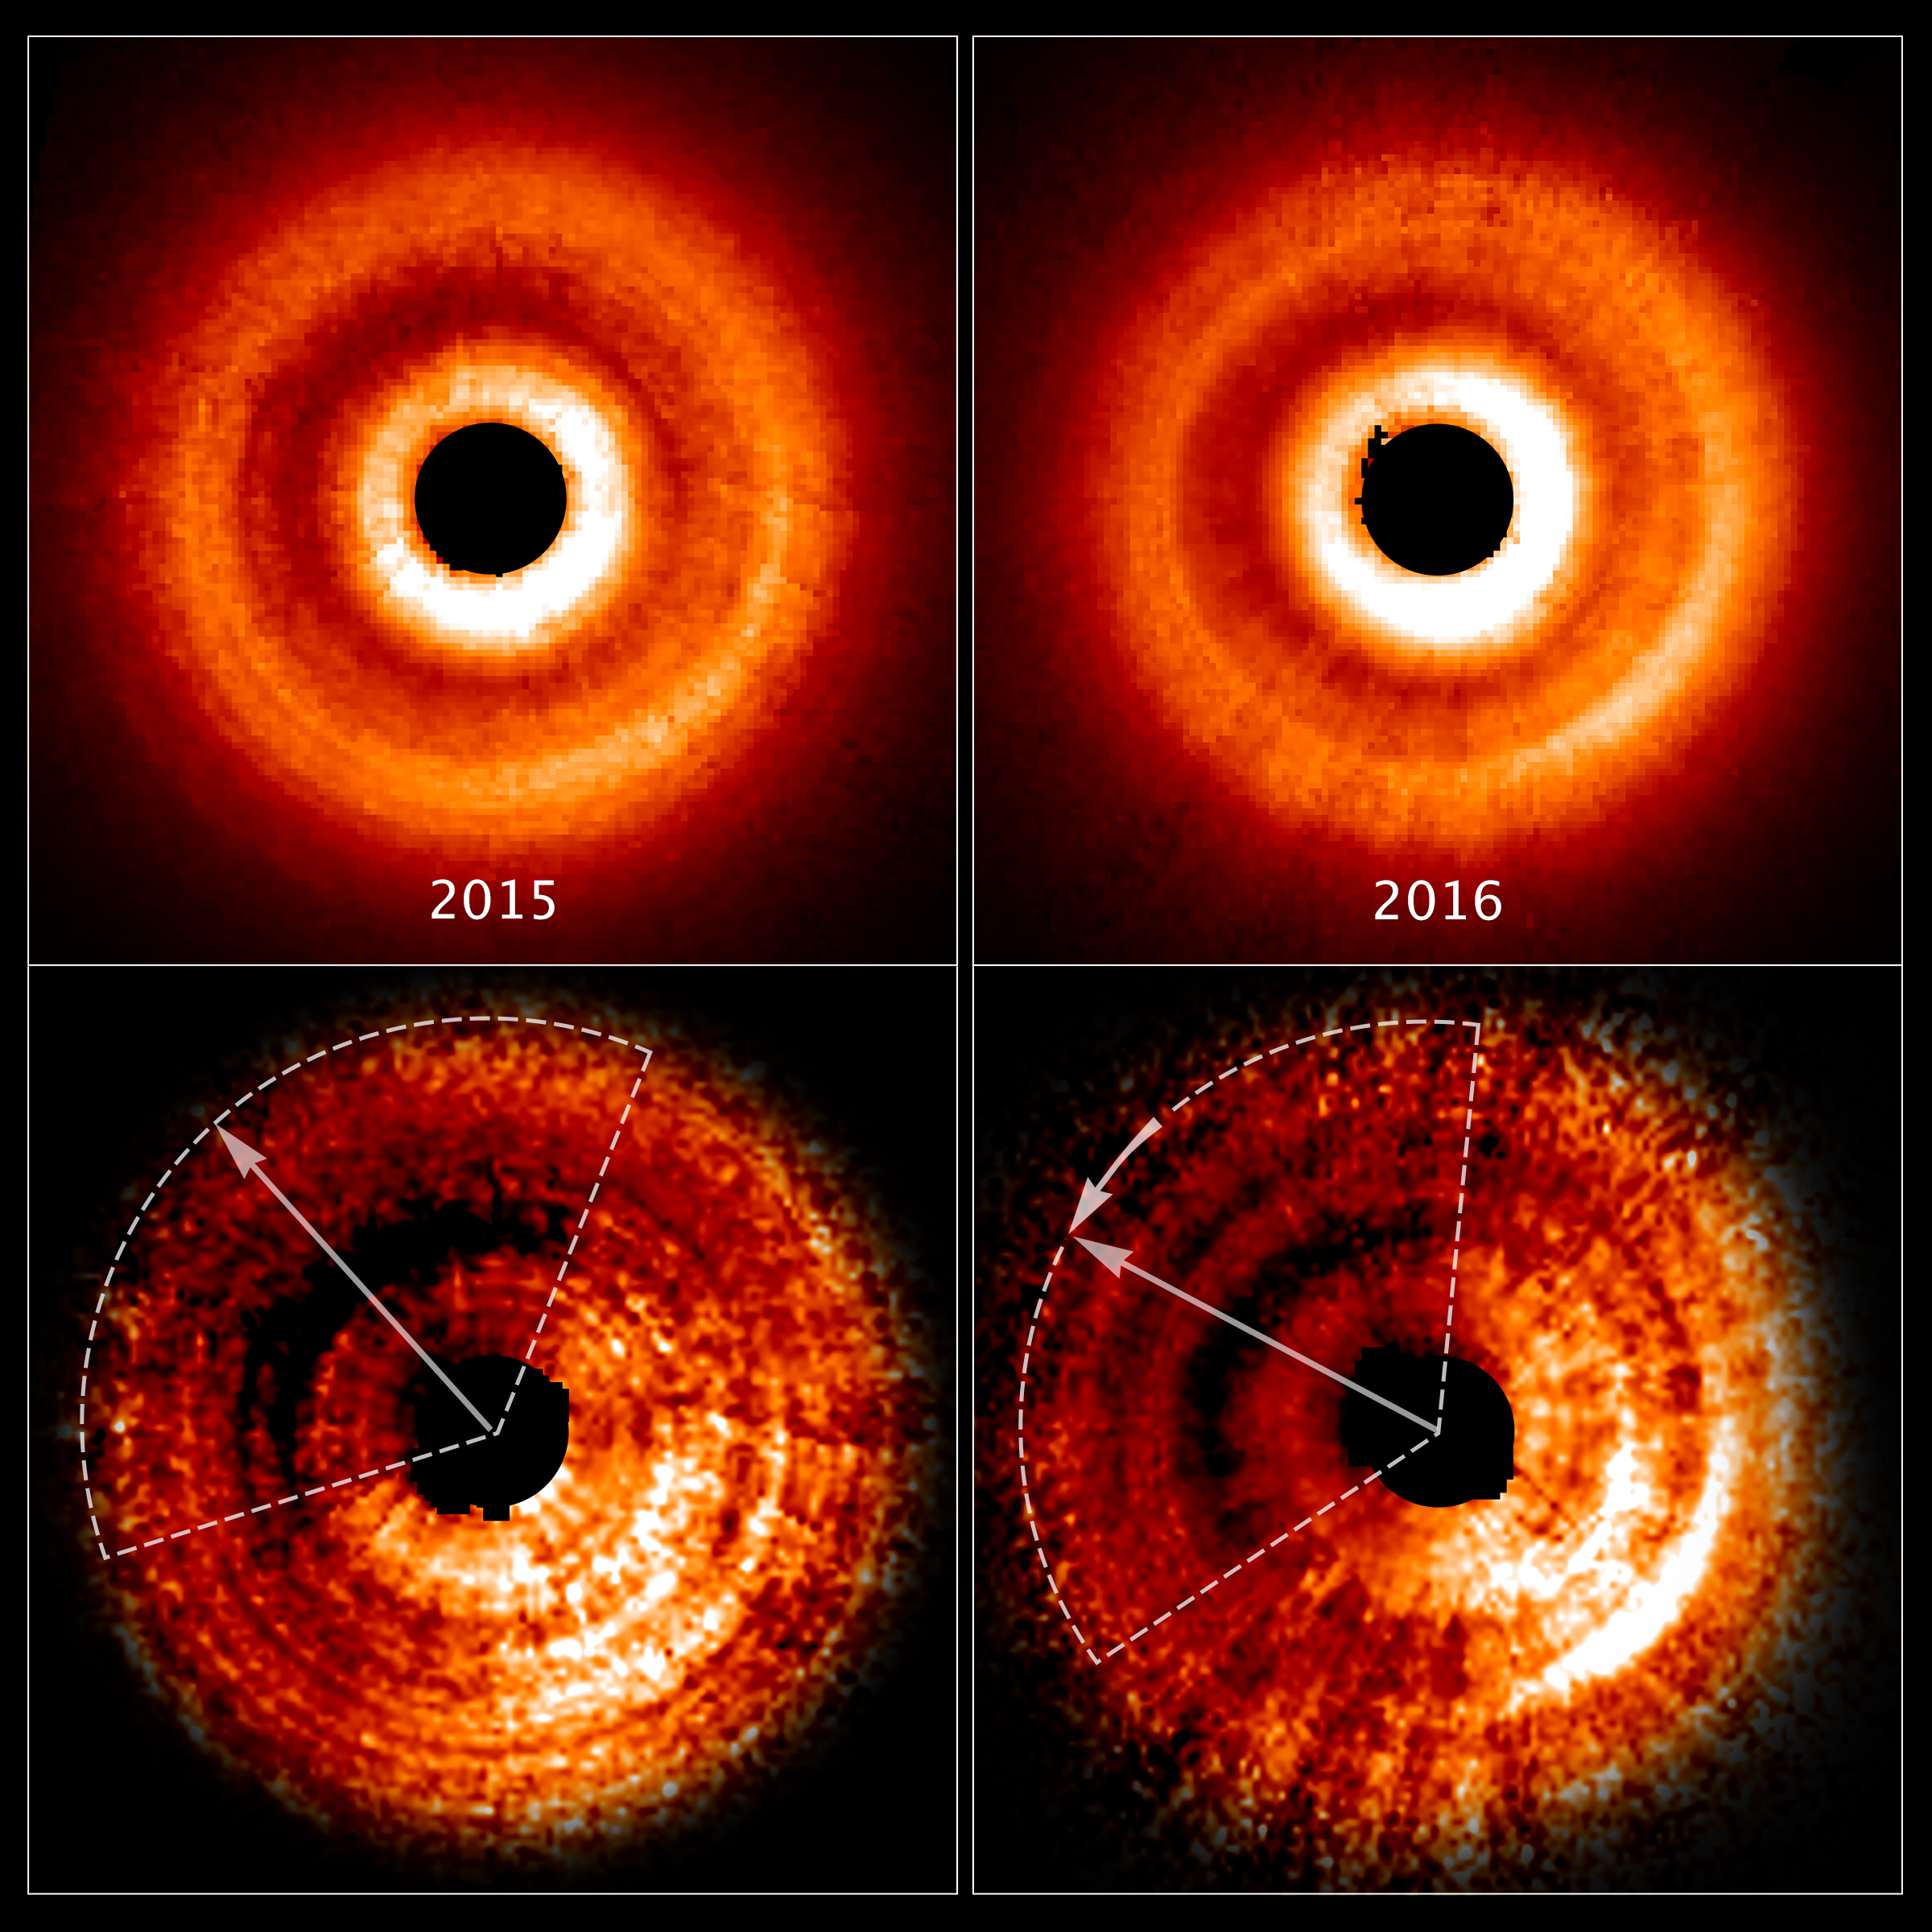

Shadow on TW Hydrae’s disc

These images, taken a year apart by the NASA/ESA Hubble Space Telescope, reveal a shadow moving counterclockwise around a gas and dust disc encircling the young star TW Hydrae.

The two images at the top, taken by the Space Telescope Imaging Spectrograph, show an uneven brightness across the disc. Through enhanced image processing (images at bottom), the darkening becomes even more apparent. These enhanced images allowed astronomers to determine the reason for the changes in brightness.

The dimmer areas of the disc (top left) are caused by a shadow spreading across the outer disc. The dotted lines approximate the shadow's coverage. The long arrows show how far the shadow has moved in a year (from 2015-2016), which is roughly 20 degrees.

Based on Hubble archival data, astronomers determined that the shadow completes a rotation around the central star every 16 years. They know the feature is a shadow because dust and gas in the disc do not orbit the star nearly that quickly. So, the feature must not be part of the physical disc.

The shadow may be caused by the gravitational effect of an unseen planet orbiting close to the star. The planet pulls up material from the main disc, creating a warped inner disc. The twisted disc blocks light from the star and casts a shadow onto the disc's outer region.

Credit: NASA, ESA, and J. Debes (STScI)